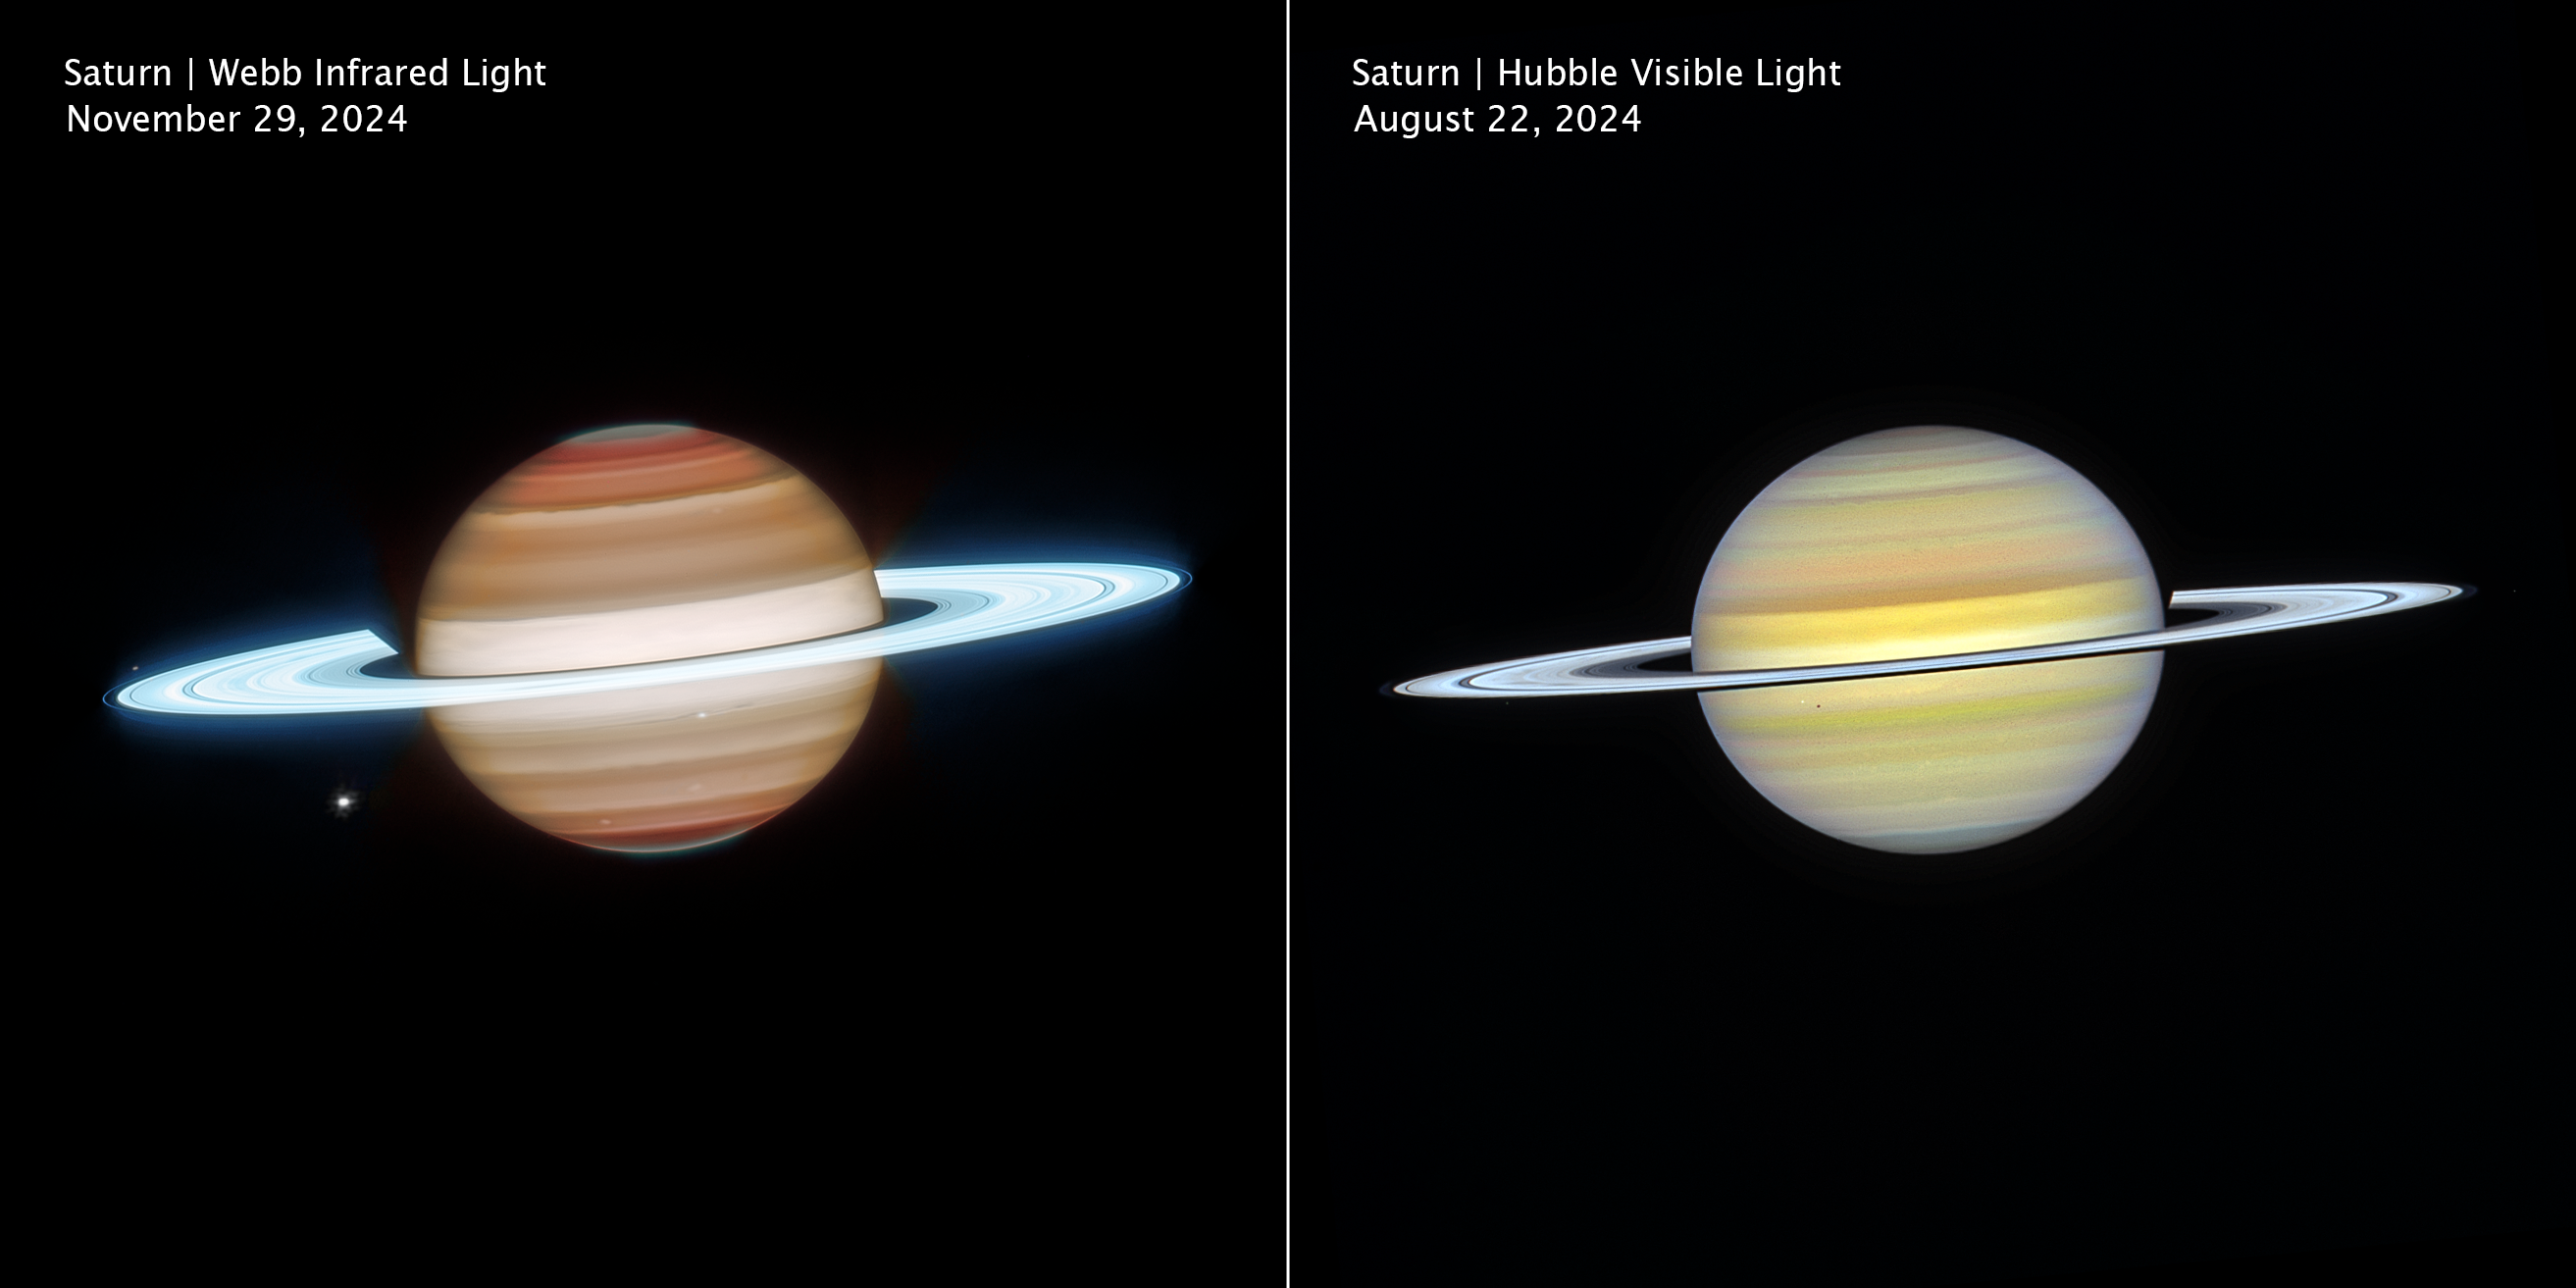

Saturn (2024 Webb and Hubble images, clean)

Side-by-side views of Saturn from the NASA/ESA/CSA James Webb Space Telescope (left) and the NASA/ESA Hubble Space Telescope (right) reveal the planet in infrared and visible light. Hubble highlights subtle cloud banding and colour variations, while Webb’s infrared vision probes different atmospheric layers, bringing out storms, waves, and glowing ring structures in striking detail.

Credit: NASA, ESA, CSA, STScI, A. Simon (NASA-GSFC), M. Wong (University of California); Image Processing: J. DePasquale (STScI)